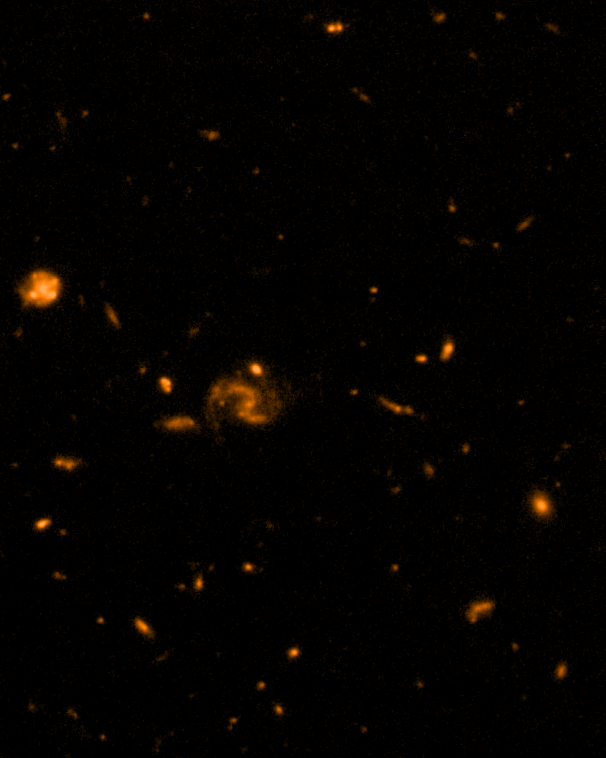

ACS I-band

NASA's Servicing Mission 3B for the Hubble Space Telescope will give the orbiting observatory a new camera that will significantly increase Hubble's abilities and enable a broad array of new astronomical discoveries. The Advanced Camera for Surveys (ACS) covers twice the area, has twice the sharpness, and is up to five times more sensitive to light than Hubble's workhorse camera, the Wide Field and Planetary Camera 2. The servicing mission will begin on Feb. 28 with the launch of the space shuttle Columbia. The simulated image above depicts how the cosmos will look through the 'eyes' of the ACS (I-band).

Credit: NASA & ESA